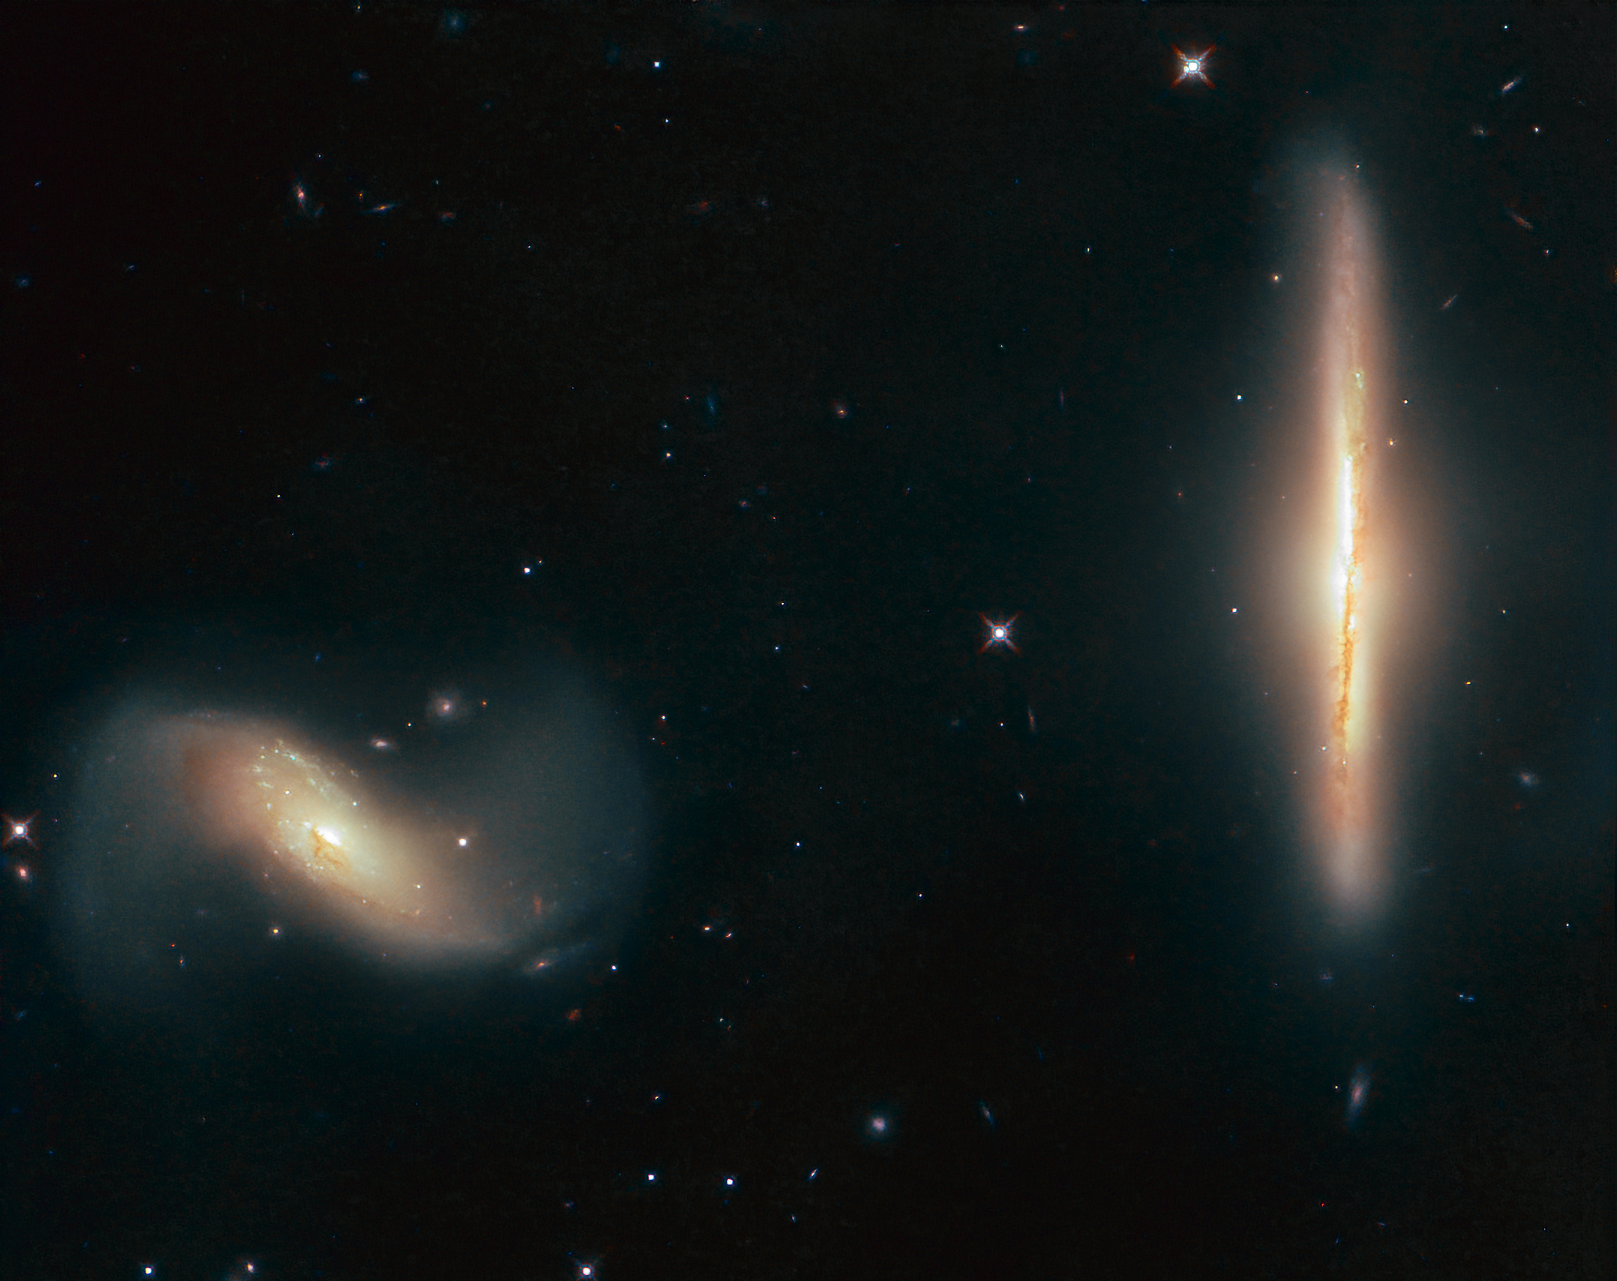

A Close Relationship

Some galaxies are closer friends than others. While many live their own separate, solitary lives, others stray a little too close to a near neighbour and take their relationship to the next level.

The two galaxies featured in this Picture of the Week, named NGC 6285 (left) and NGC 6286 (right), have done just that! Together, the duo is named Arp 293 and they are interacting, their mutual gravitational attraction pulling wisps of gas and streams of dust from them, distorting their shapes, and gently smudging and blurring their appearances on the sky — to Earth-based observers, at least.

The NASA/ESA Hubble Space Telescope has viewed a number of interacting pairs. These can have distinctive, beautiful, and downright odd shapes, ranging from sheet music to a spaceship entering a sci-fi-esque wormhole, a bouquet of celestial blooms, and a penguin fiercely guarding its precious egg.

Arp 293 is located in the constellation of Draco (The Dragon), and lies over 250 million light-years from Earth.

Credit: ESA/Hubble & NASA, K. Larson et al.